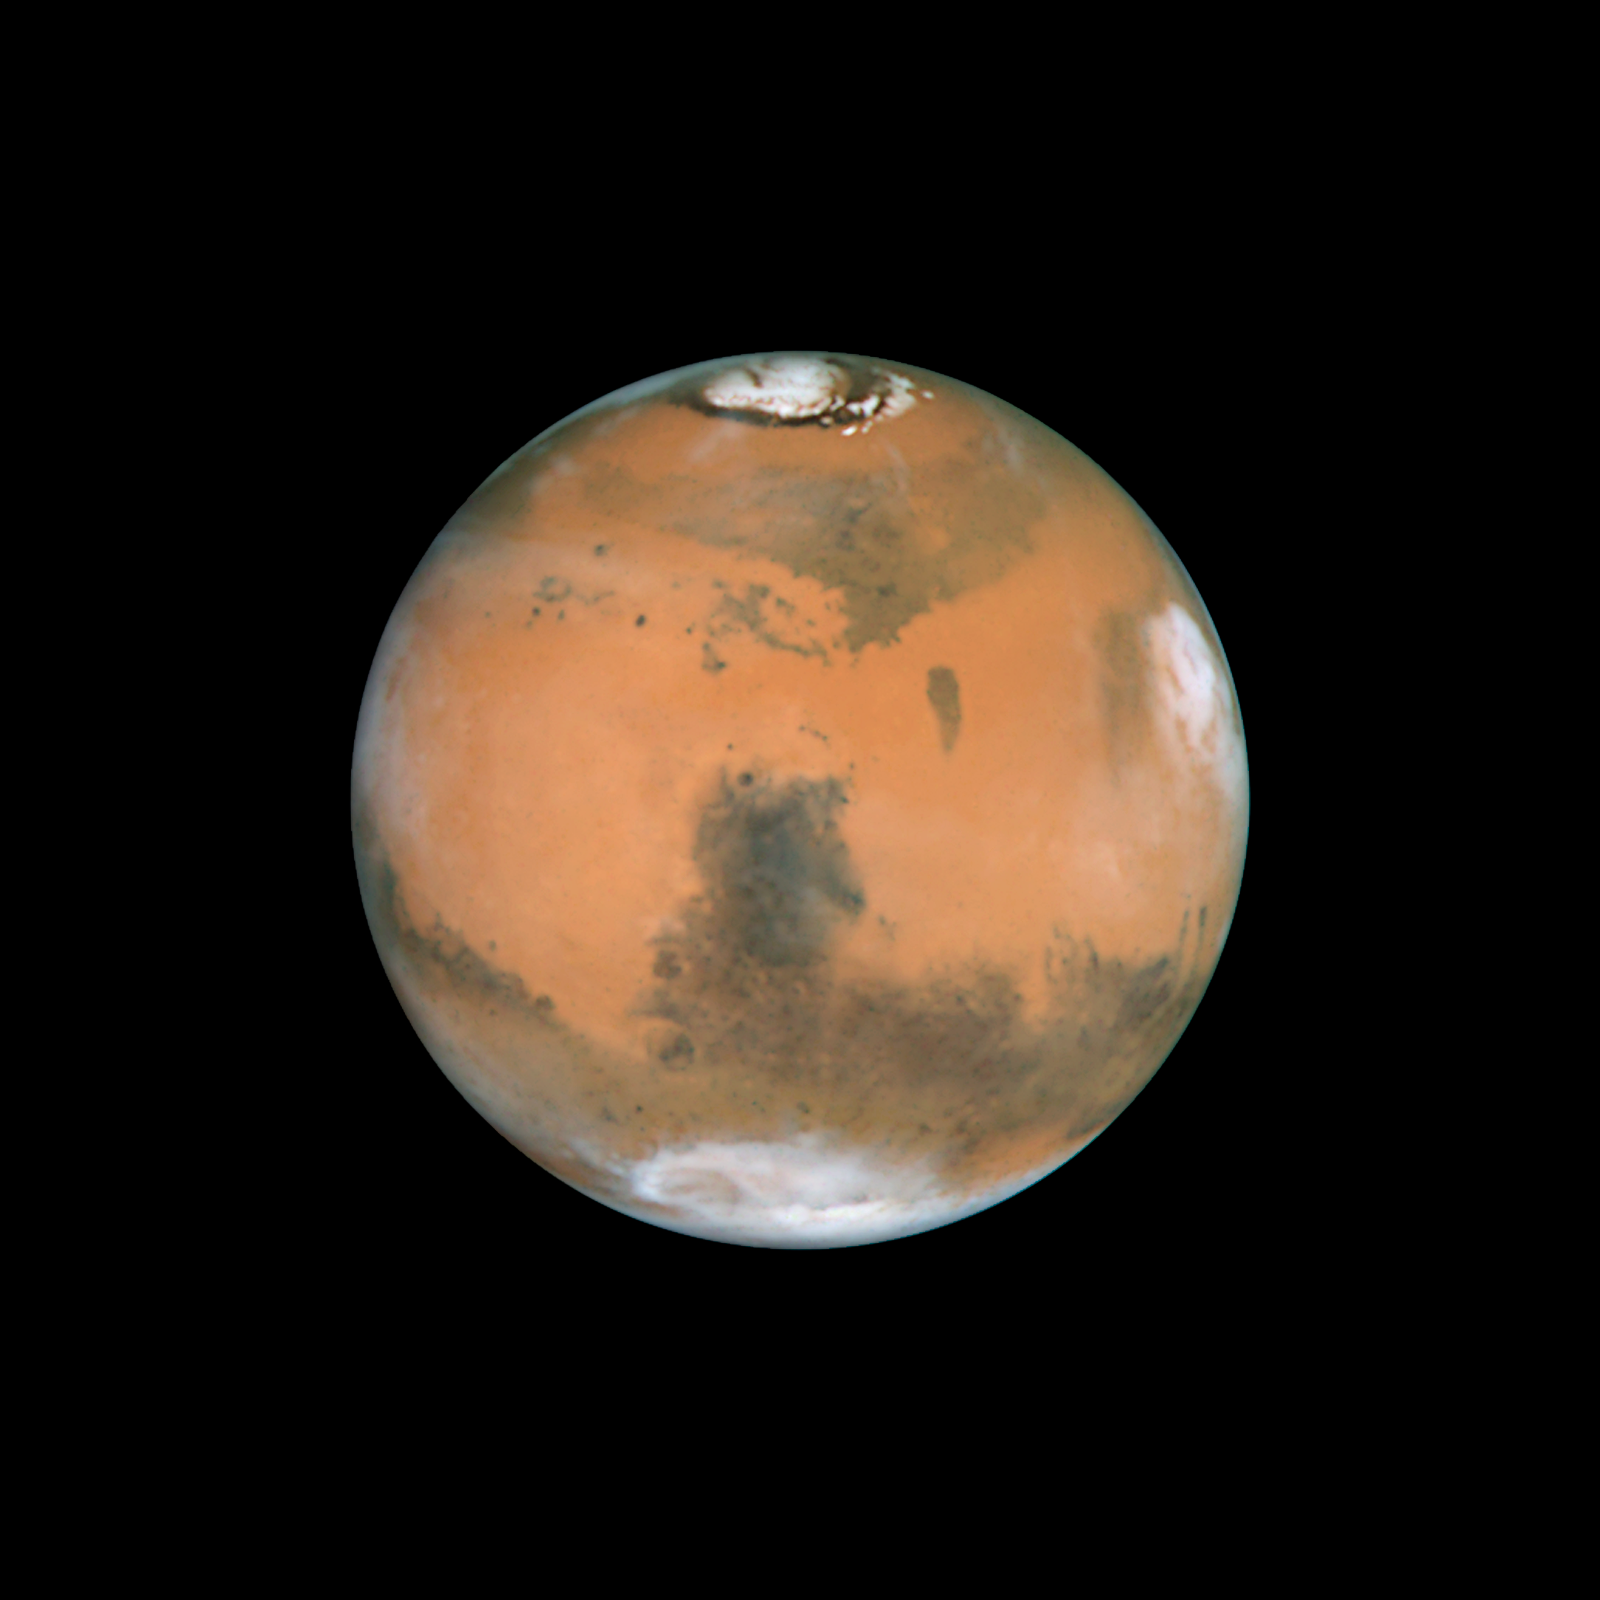

Mars near opposition 1995-2005: 1999

NASA's Hubble Space Telescope snapped this picture of Mars on October 28, within a day of its closest approach to Earth on the night of October 29. The large regional dust storm appears as the brighter, redder cloudy region in the middle of the planet's disk.

Credit: NASA, ESA, and The Hubble Heritage Team (STScI/AURA)